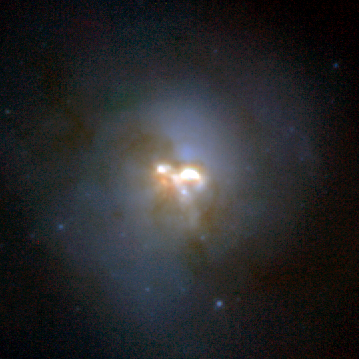

A Collision in the Heart of a Galaxy

The Hubble Space Telescope's Near Infrared Camera and Multi-Object Spectrometer(NICMOS) has uncovered a collision between two spiral galaxies in the heart of the peculiar galaxy called Arp 220. The collision has provided the spark for a burst of star formation.

Credit: Rodger Thompson, Marcia Rieke, Glenn Schneider (University of Arizona) and Nick Scoville (California Institute of Technology), and NASA/ESA